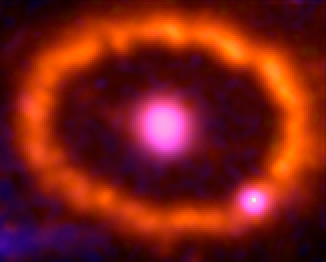

Supernova 1987A: September 24, 1994

This photo album of images from NASA/ESA Hubble Space Telescope shows a ring of gas beginning to glow around an exploded star.

The stellar blast, called Supernova 1987A, was first spotted 20 years ago. The explosion is one of the brightest supernova blasts in more than 400 years. Hubble began watching the blast's aftermath shortly after it was launched in 1990.

The growing number of bright spots on the ring was produced by an onslaught of material unleashed by the blast. The shock wave of material is slamming into the ring's innermost regions, heating them up, and causing them to glow. The ring, about a light-year across, was probably shed by the star about 20,000 years before the star exploded.

Astronomers detected the first bright spot in 1997, but now they see dozens of spots around the ring. Only Hubble can see the individual bright spots. In the next few years, the entire ring will be ablaze as it absorbs the full force of the crash. The glowing ring is expected to become bright enough to illuminate the star's surroundings, providing astronomers with new information on how the star expelled material before the explosion.

The bright spot that appears to be on the ring at lower right is actually a foreground star. Supernova 1987A is 163,000 light-years away in the Large Magellanic Cloud.

The images were taken between 1994 and 2006 with Hubble's Wide Field Planetary Camera 2 and Advanced Camera for Surveys.

Credit: NASA, ESA, and R. Kirshner (Harvard-Smithsonian Center for Astrophysics)